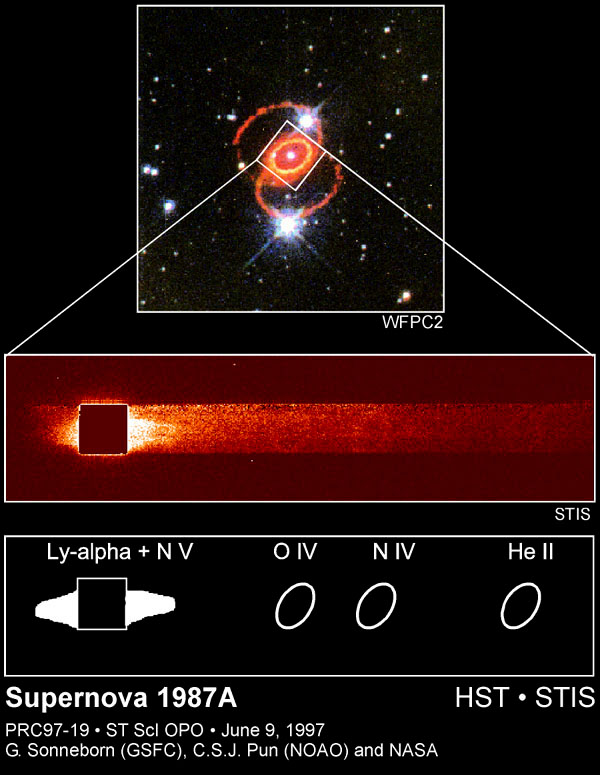

Supernova 1987a

This is the first time that astronomers have measured the very fast moving gas ejected by the supernova explosion, which was invisible until observed by Hubble with the STIS ultraviolet detectors. This gas is glowing in the ultraviolet because it is slamming into the remains of the gas lost by the supernova star about 20, 000 years before it exploded.

Credit: Peter Challis (Harvard/Smithsonian Center for Astrophysics) and the SINS collaboration